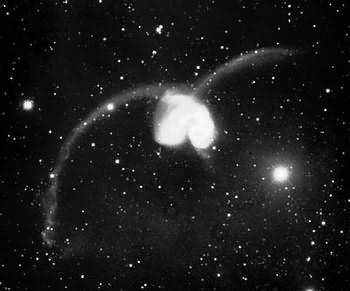

NGC 4038/4039

The spiral galaxies NGC 4038 and NGC 4039 form together the famous Antennae Galaxies, named after the long tails of gas, dust and stars they eject. These antennae are the results of a recent collision between the two galaxies. Due to their proximity of about 70 million light years they are the nearest and youngest pair of colliding galaxies in our galactic neighbourhood.

The collision of the galaxies created a massive concentration of gas, which can not only be found in the hearts of the two galaxies but also in the chaotic regions where they are colliding and in the anntenae. This gas is the building material for a new generation of stars which is born therein.

Credit: Francois Schweizer (CIW/DTM)